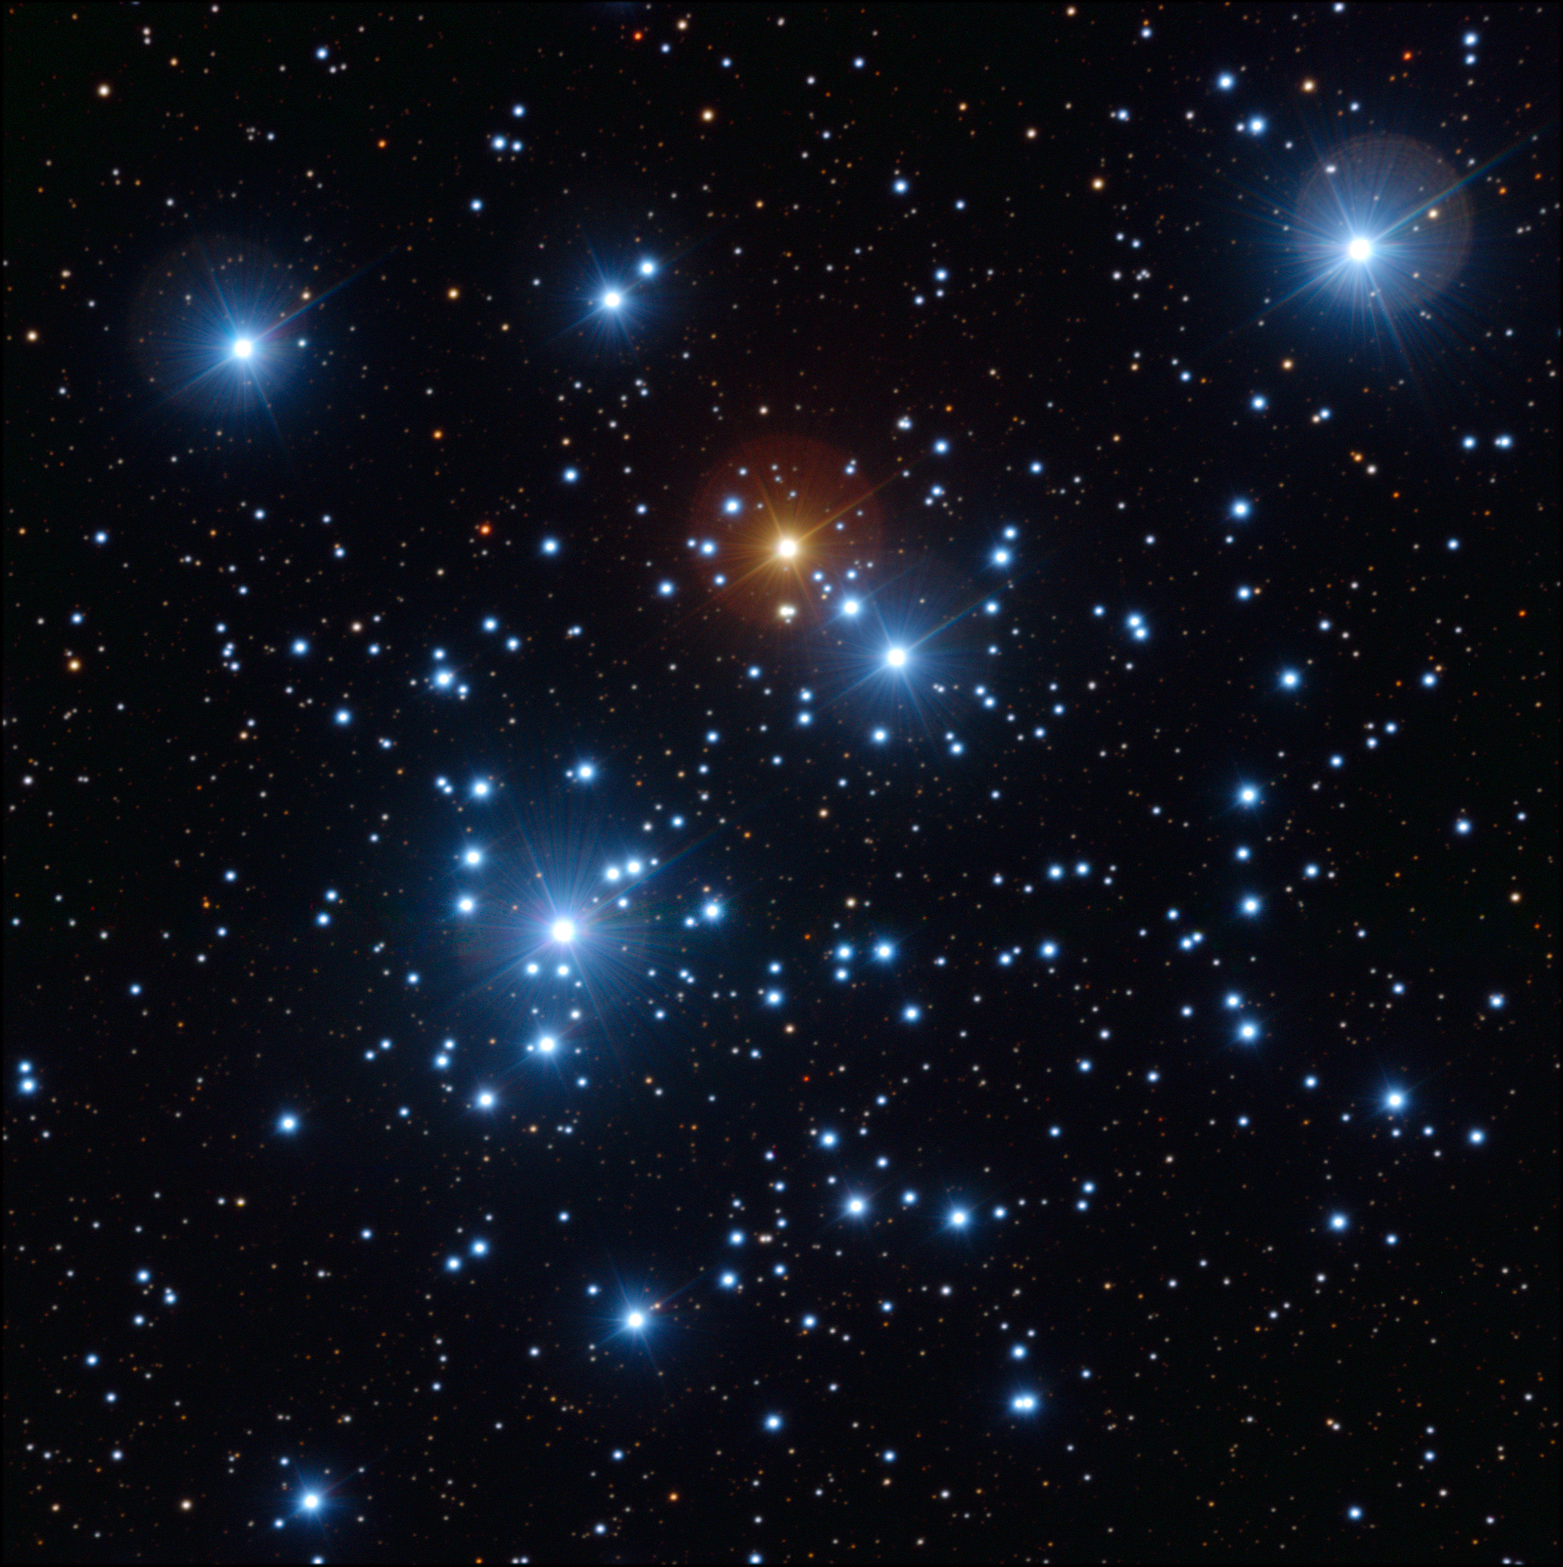

A snapshot of the Jewel Box cluster with the ESO VLT

The FORS1 instrument on the ESO Very Large Telescope (VLT) at ESO's Paranal Observatory was used to take this exquisitely sharp close up view of the colourful Jewel Box cluster, NGC 4755. The telescopes huge mirror allowed very short exposure times: just 2.6 seconds through a blue filter, 1.3 seconds through a yellow/green filter and 1.3 seconds through a red filter. The field of view spans about seven arcminutes.

Credit: ESO